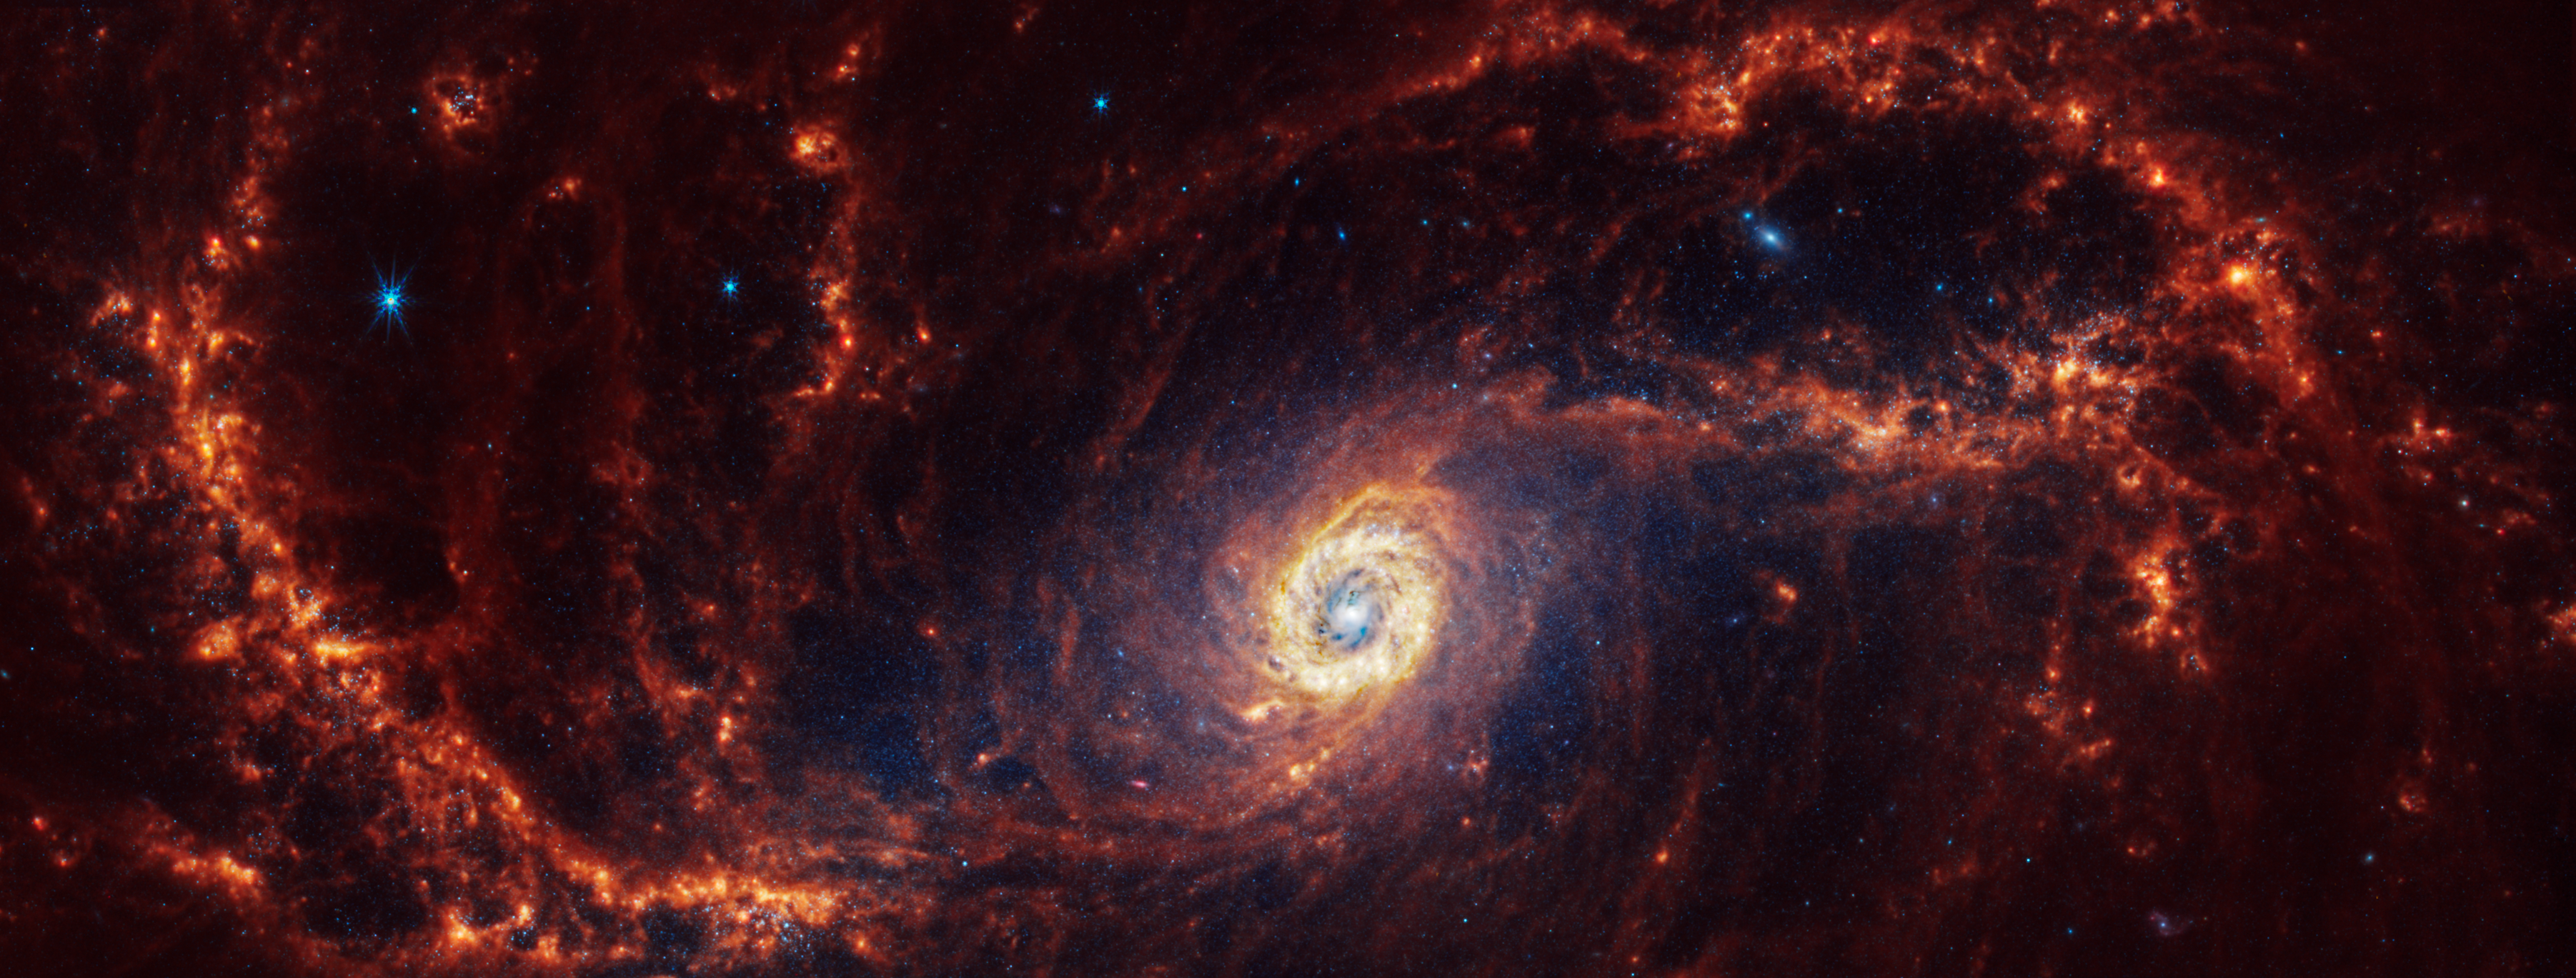

NGC 1672

Physics at High Angular resolution in Nearby GalaxieS (PHANGS) program, a large project that includes observations from several space- and ground-based telescopes of many galaxies to help researchers study all phases of the star formation cycle, from the formation of stars within dusty gas clouds to the energy released in the process that creates the intricate structures revealed by Webb’s new images.

NGC 1672 is 60 million light-years away in the constellation Dorado.

Learn more about what can be seen in this vast collection of Webb images here.

Credit: NASA, ESA, CSA, STScI, J. Lee (STScI), T. Williams (Oxford), PHANGS Team